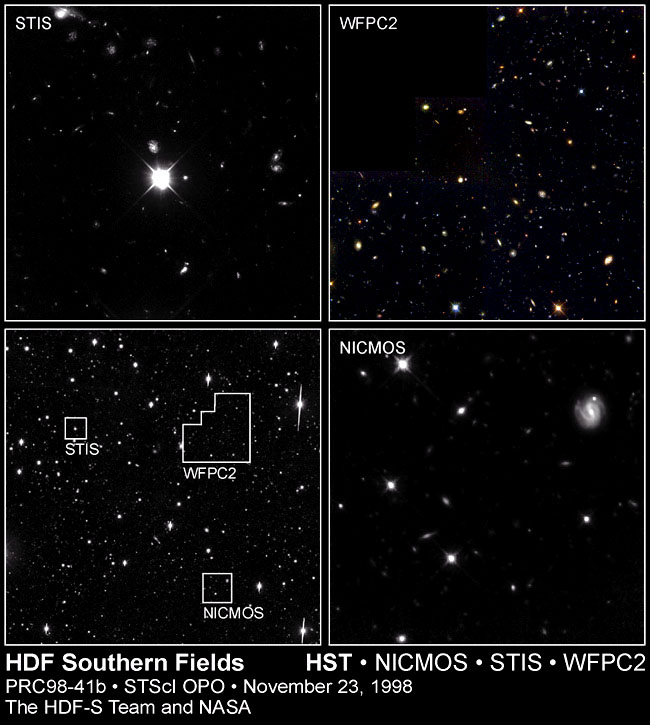

Hubble Deep Field South--Multiple Windows on the Universe

Peering at a small patch of sky near the south celestial pole, the NASA/ESA Hubble Space Telescope used its full array of instruments to look nearly all the way across the universe. Called the Hubble Deep Field South (HDF-S), this new far-look complements the original Hubble 'deep field' taken in late 1995, when Hubble was aimed at a small patch of space in the opposite direction on the sky, near the north celestial pole.

Credit: R. Williams (STScI), the HDF-S Team, and NASA/ESA